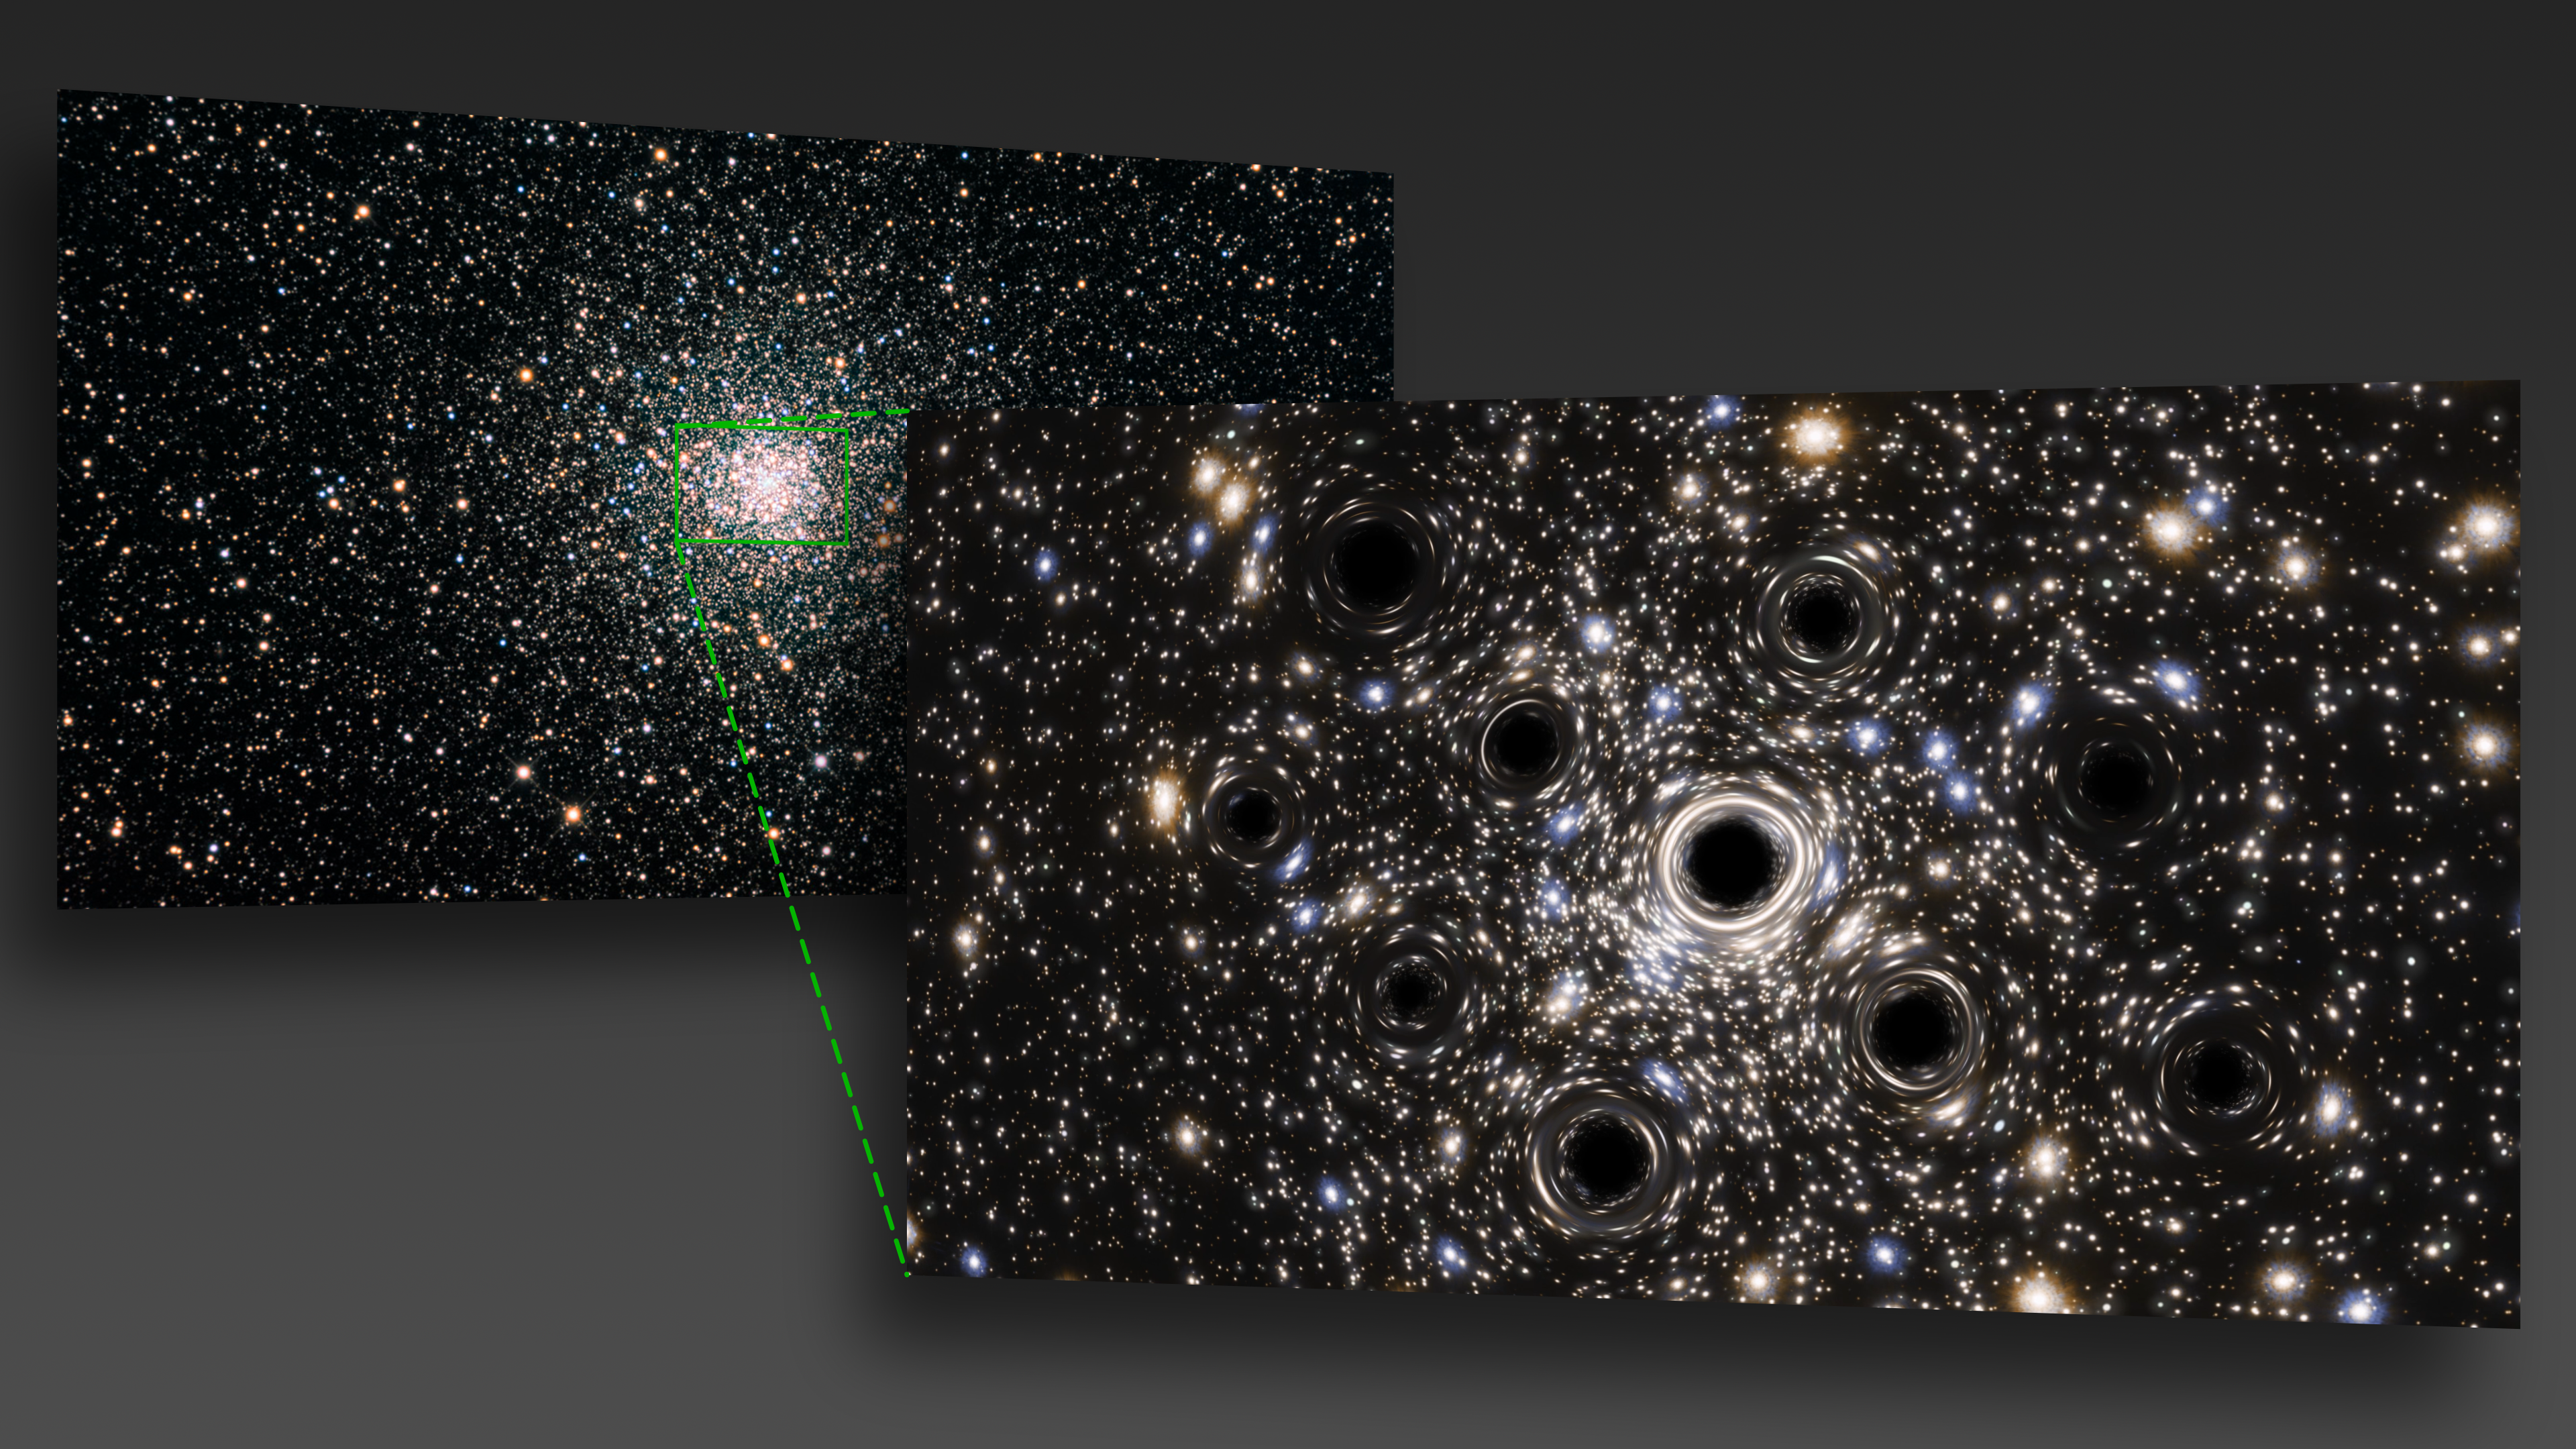

Callout of the Black Hole Concentration in NGC 6397 (Artist's Impression)

Scientists were expecting to find an intermediate-mass black hole at the heart of the globular cluster NGC 6397, but instead they found evidence of a concentration of smaller black holes lurking there. New data from the NASA/ESA Hubble Space Telescope have led to the first measurement of the extent of a collection of black holes in a core-collapsed globular cluster.

This is an artist’s impression created to visualize the concentration of black holes at the center of NGC 6397. In reality, the small black holes here are far too small for the direct observing capacities of any existing or planned future telescope, including Hubble. It is predicted that this core-collapsed globular cluster could be host to more than 20 black holes.

Credit: ESA/Hubble, N. Bartmann